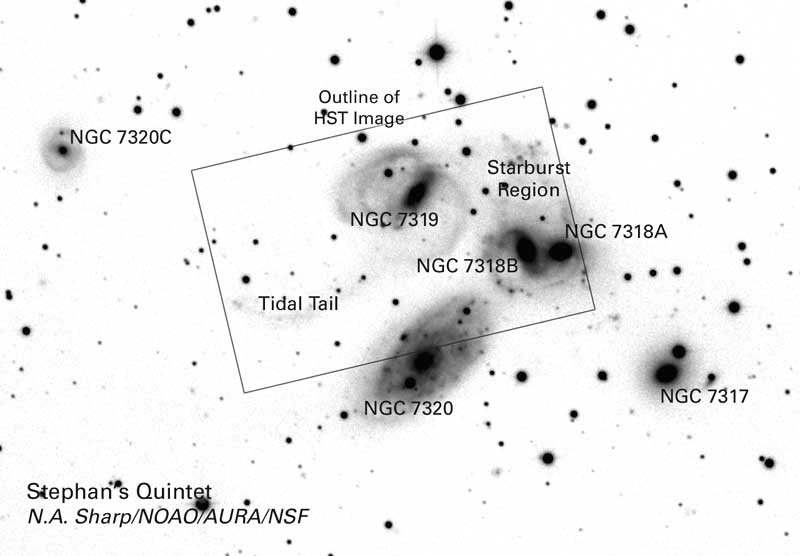

Stephan's Quintet

In the beginning of the 1946 holiday film classic "It's a Wonderful Life," angelic figures take on the form of a famous group of compact galaxies known as Stephan's Quintet. In reality, these galaxies aren't so heavenly. Pictures from NASA's Hubble Space Telescope show that Stephan's Quintet has been doing some devilish things. At least two of the galaxies have been involved in high-speed, hit-and-run accidents, which have ripped stars and gas from neighboring galaxies and tossed them into space.

Credit: NASA & ESA